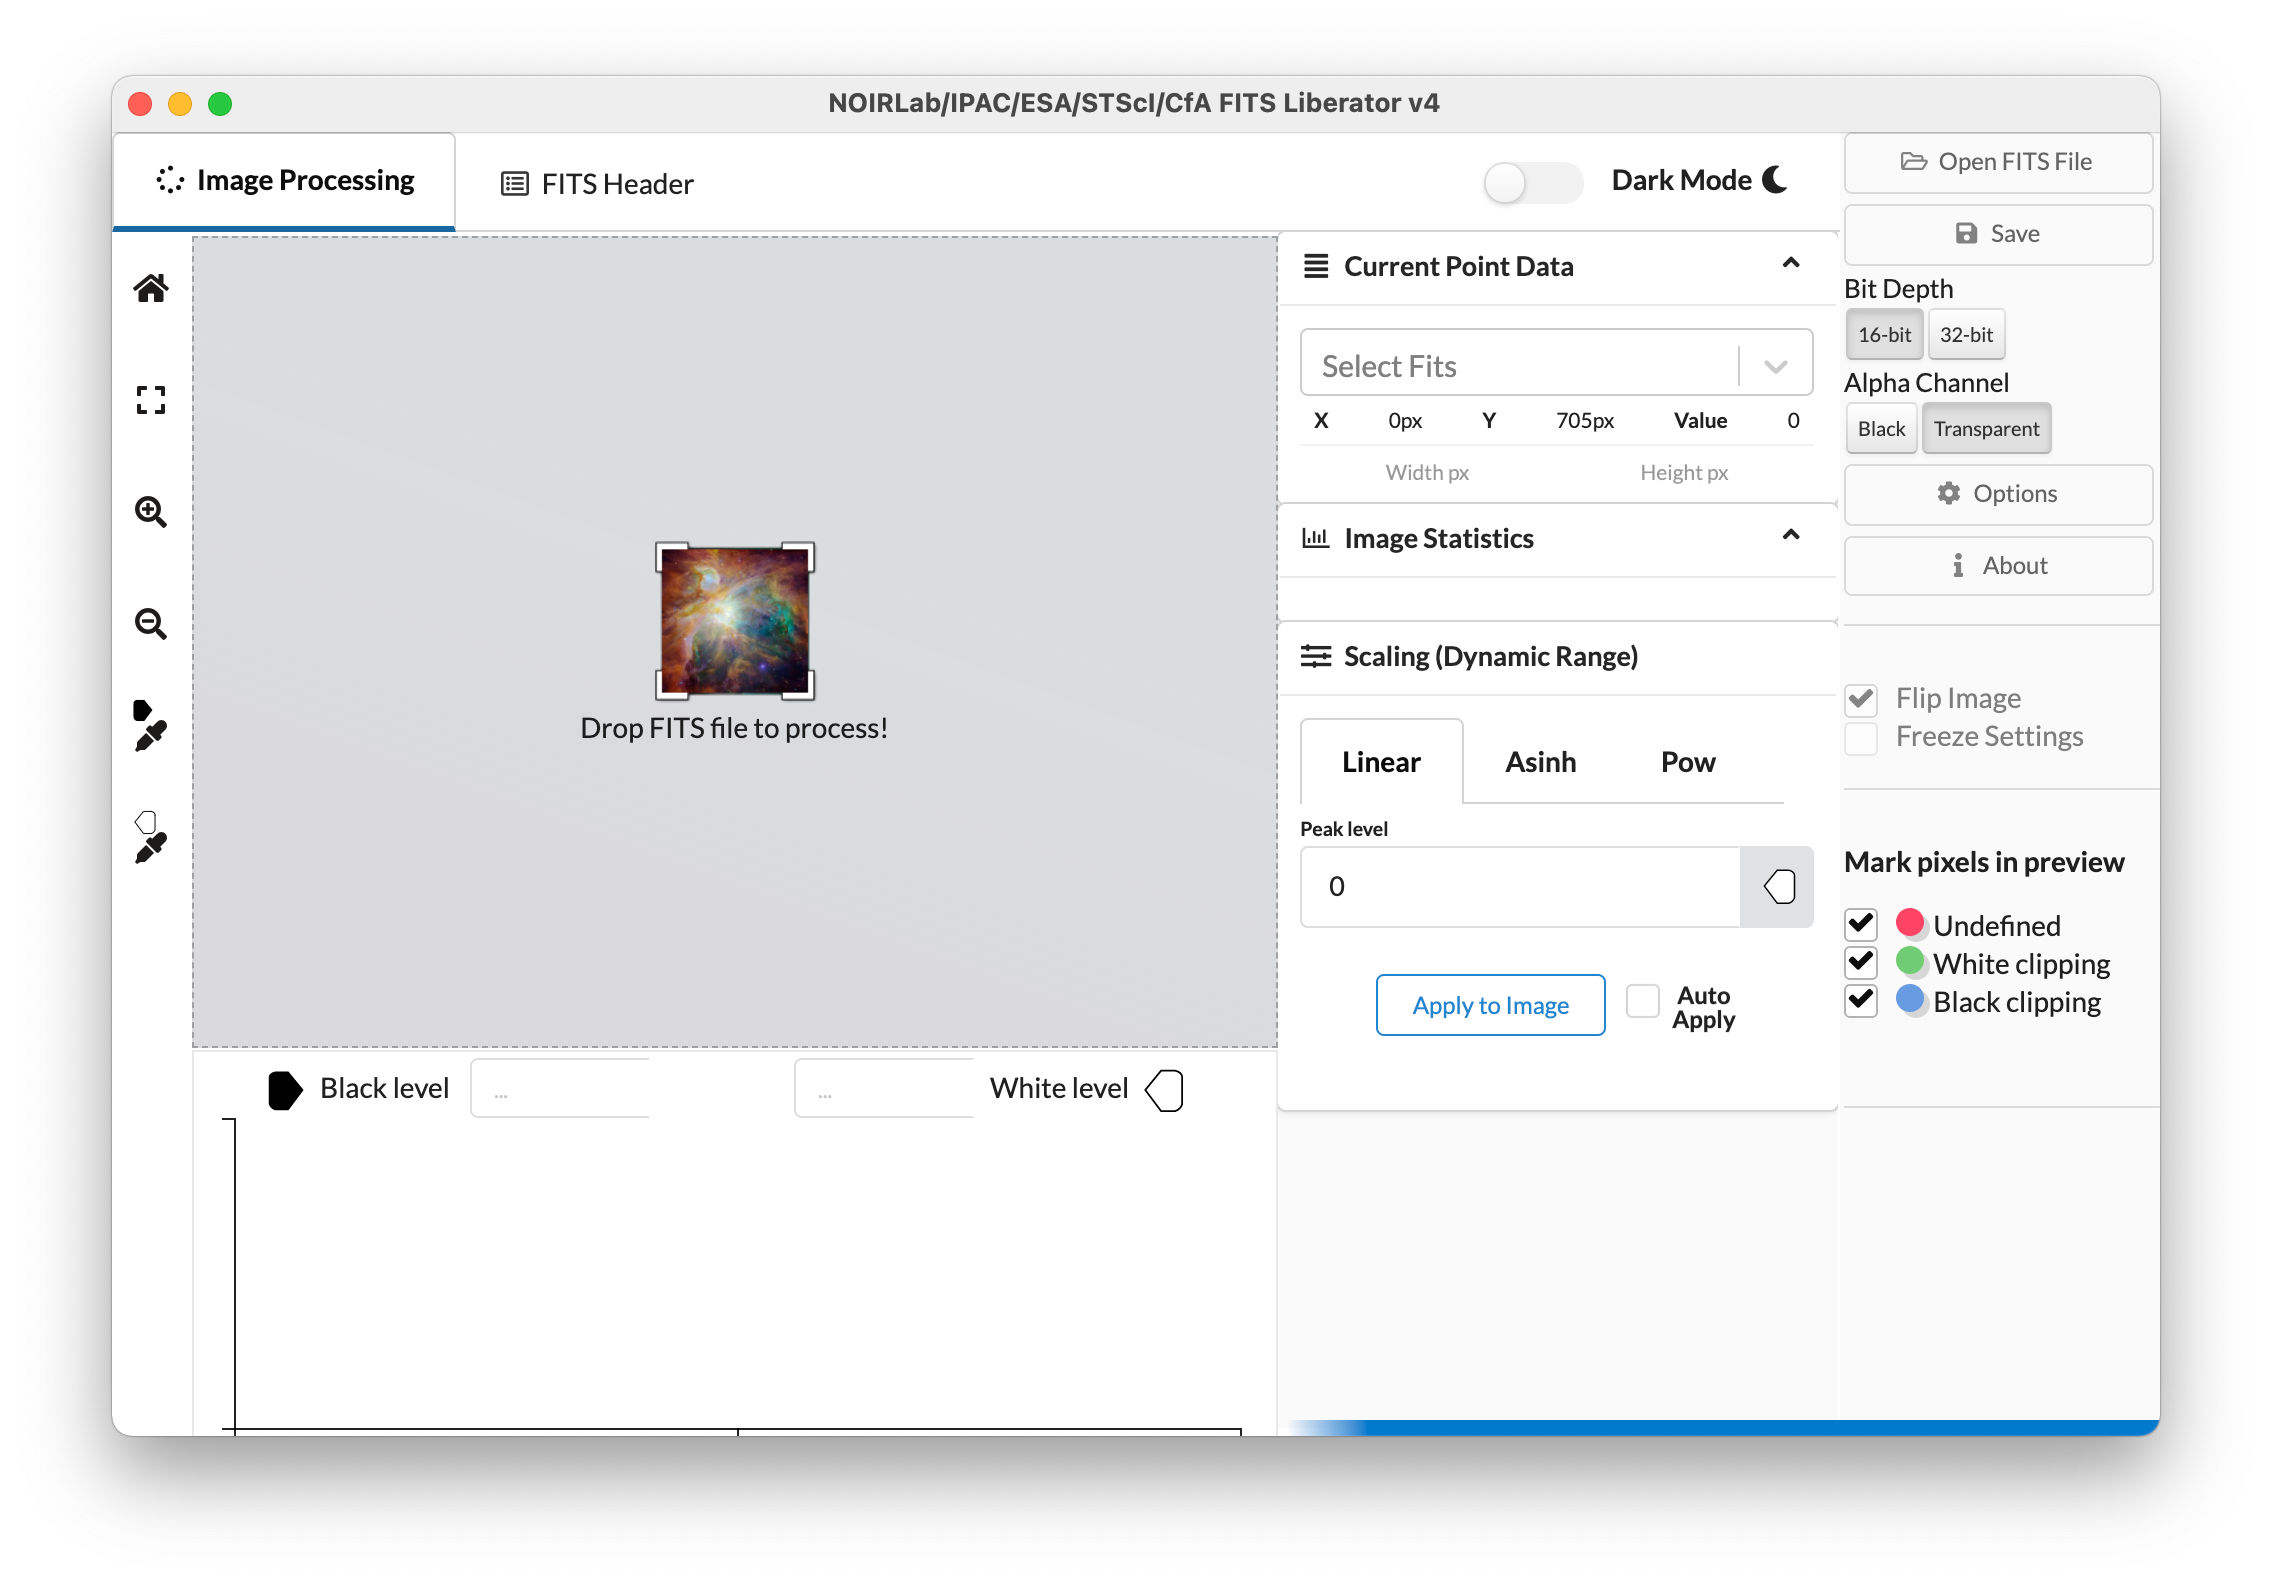

Screenshot of the NOIRLab/IPAC/ESA/STScI/CfA FITS Liberator version 4

This image shows the fourth version of the popular FITS Liberator image-processing software, which includes several significant improvements over previous versions.

Credit: NOIRLab/IPAC/ESA/STScI/CfA